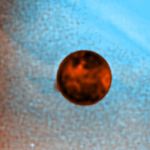

Hubble Captures Volcanic Eruption Plume From Io

The Hubble Space Telescope has snapped a picture of a 400-km-high (250-mile-high) plume of gas and dust from a volcanic eruption on Io, Jupiter's large innermost moon.

Io was passing in front of Jupiter when this image was taken by the Wide Field and Planetary Camera 2 in July 1996. The plume appears as an orange patch just off the edge of Io in the eight o'clock position, against the blue background of Jupiter's clouds. Io's volcanic eruptions blasts material hundreds of kilometers into space in giant plumes of gas and dust. In this image, material must have been blown out of the volcano at more than 2, 000 mph to form a plume of this size, which is the largest yet seen on Io.

Credit: John Spencer, Lowell Observatory, and NASA/ESA